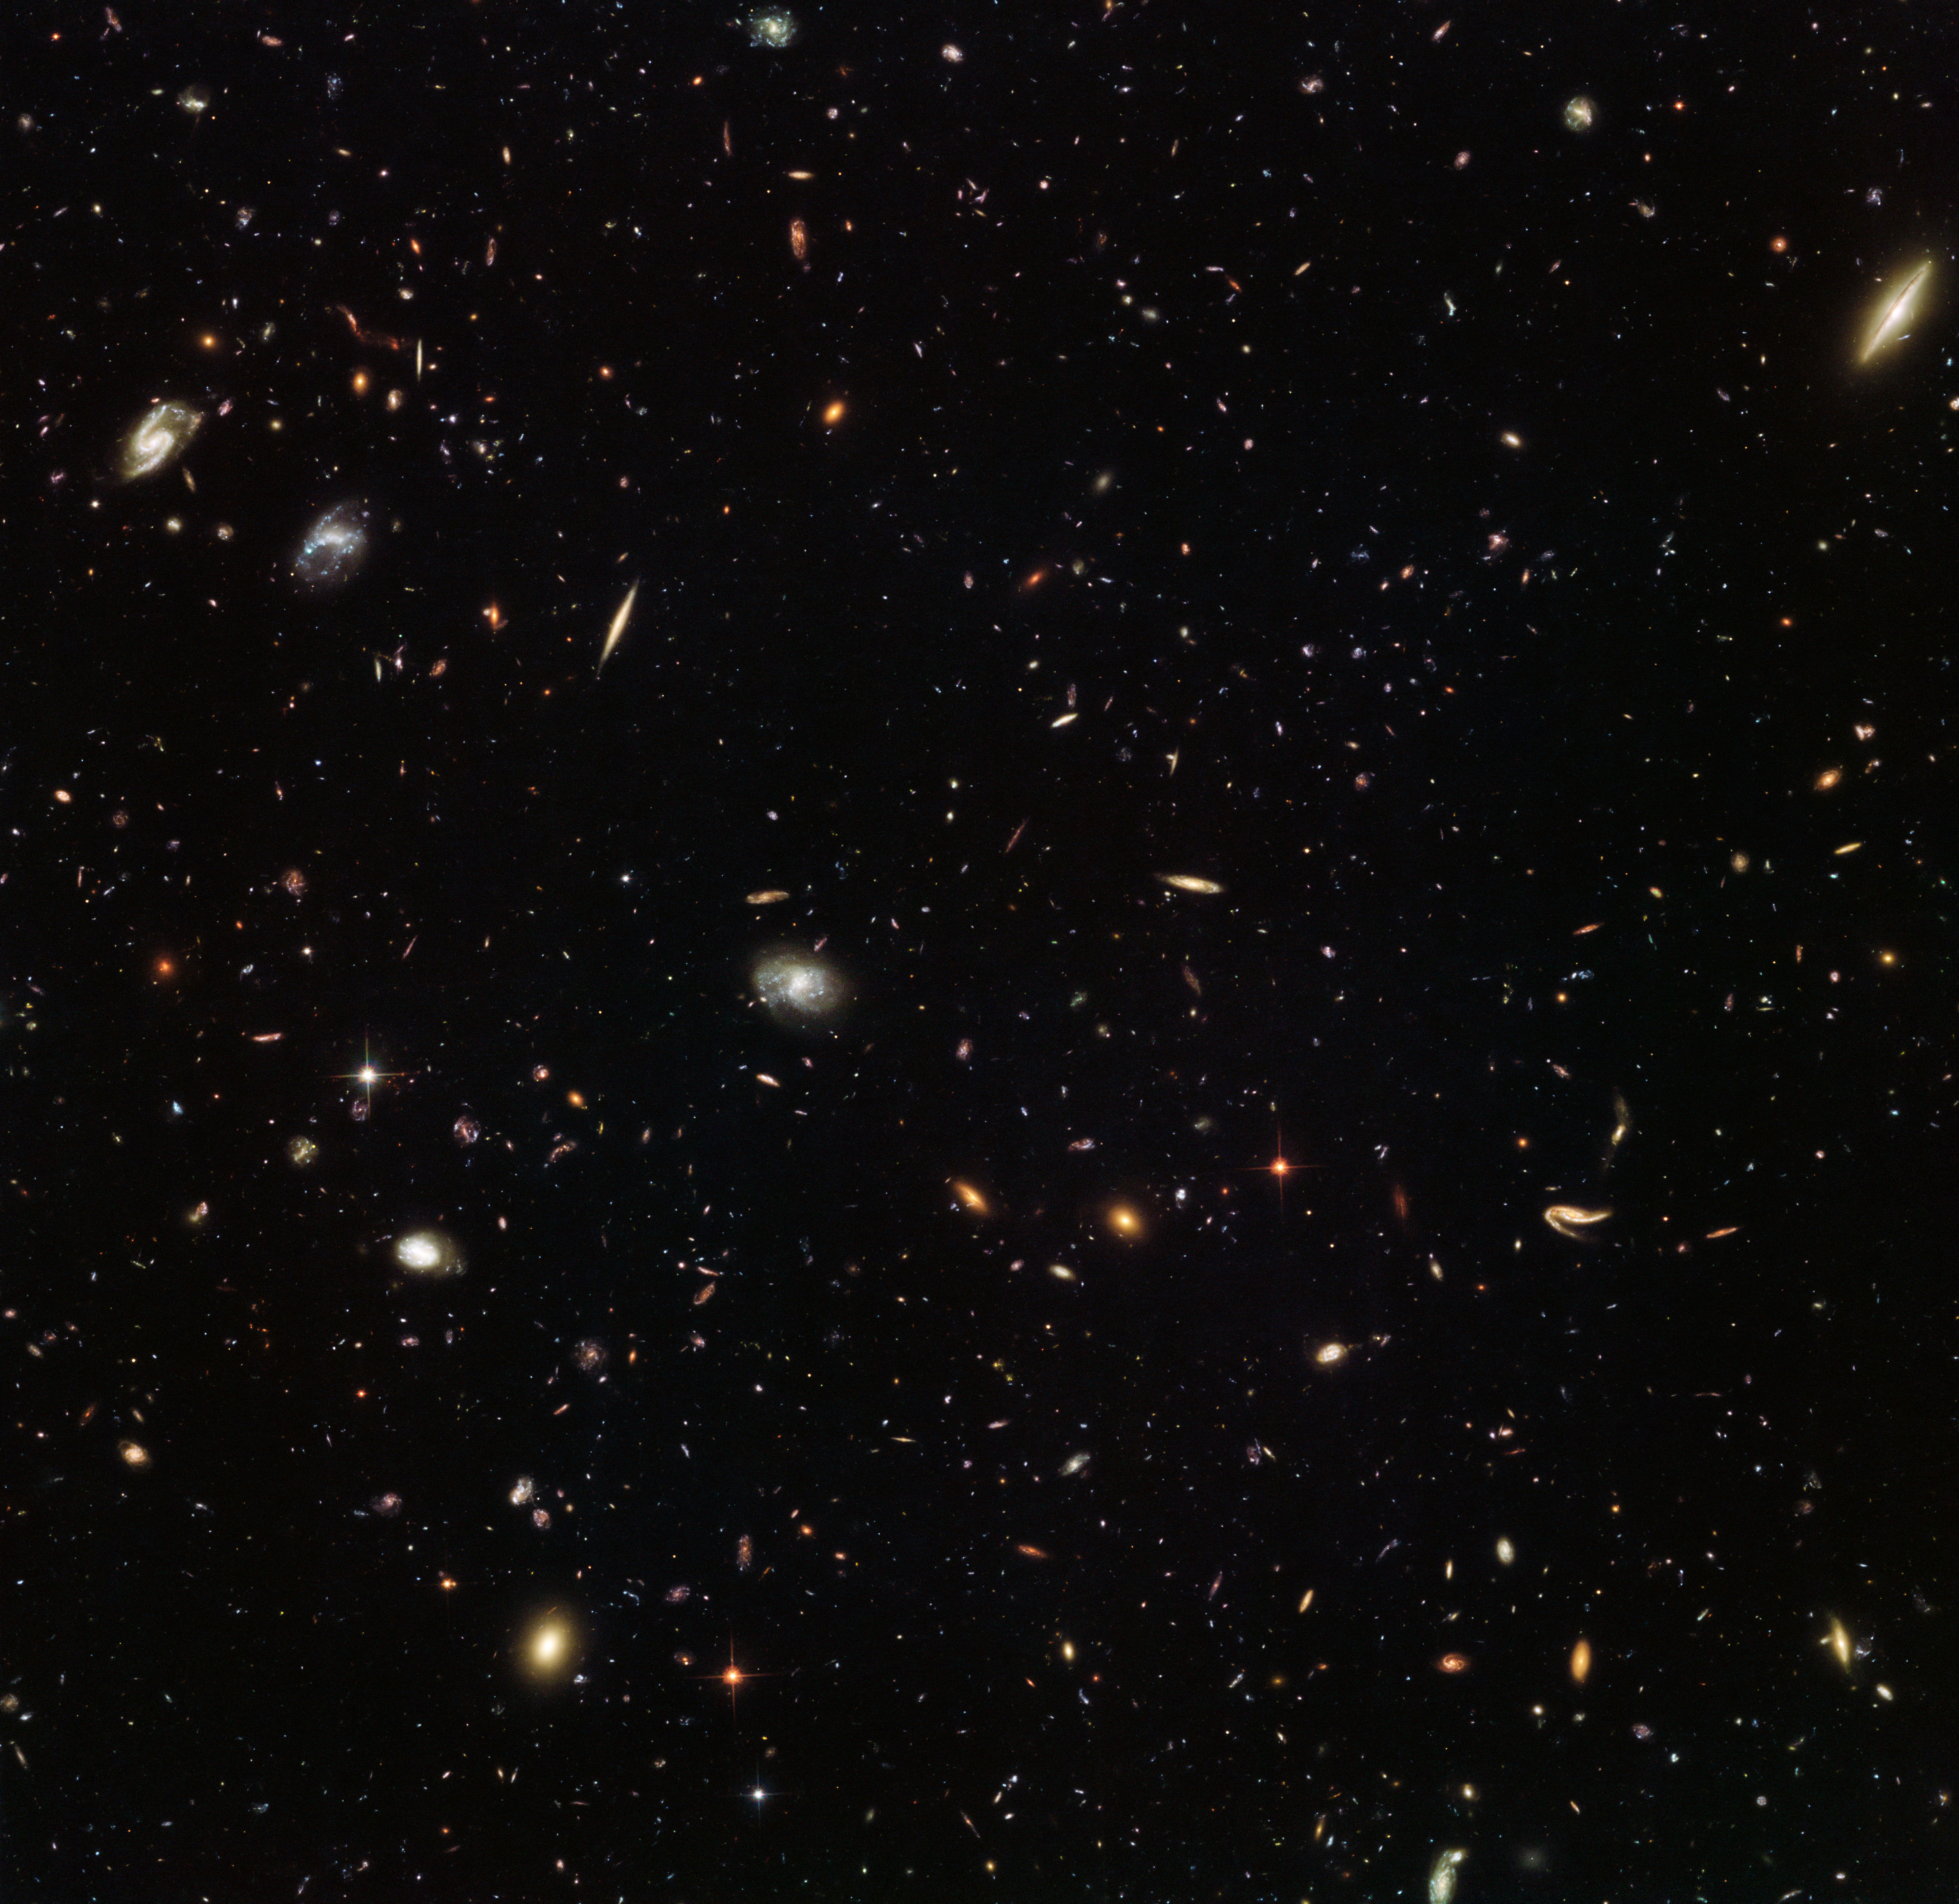

A galactic gathering

Nearly as deep as the Hubble Ultra Deep Field, which contains approximately 10 000 galaxies, this incredible image from the NASA/ESA Space Telescope reveals thousands of colourful galaxies in the constellation of Leo (The Lion). This vibrant view of the early Universe was captured as part of the Frontier Fields campaign, which aims to investigate galaxy clusters in more detail than ever before, and to explore some of the most distant galaxies in the Universe.

Galaxy clusters are massive. They can have a tremendous impact on their surroundings, with their immense gravity warping and amplifying the light from more distant objects. This phenomenon, known as gravitational lensing, can help astronomers to see galaxies that would otherwise be too faint, aiding our hunt for residents of the primordial Universe.

MACS J1149.5+2223 is a galaxy cluster located approximately five billion light-years away. In 2012, it helped astronomers uncover one of the most distant galaxies ever discovered. Light from the young galaxy, magnified 15 times by the galaxy cluster, first shone when our 13.7-billion-year-old Universe was a mere 500 million years old — just 3.6 per cent of its current age!

In 2014 and 2015, MACS J1149.5+2223 was observed as part of the Frontier Fields campaign. While one of Hubble’s cameras observed the galaxy cluster itself, another simultaneously captured the spectacular scene pictured above, of an “unremarkable” patch of space. Referred to as a parallel field, this image — when compared to other similar fields — will help astronomers understand how the Universe looks in different directions.

Credit: ESA/Hubble & NASA Acknowledgement: Judy Schmidt (Geckzilla)